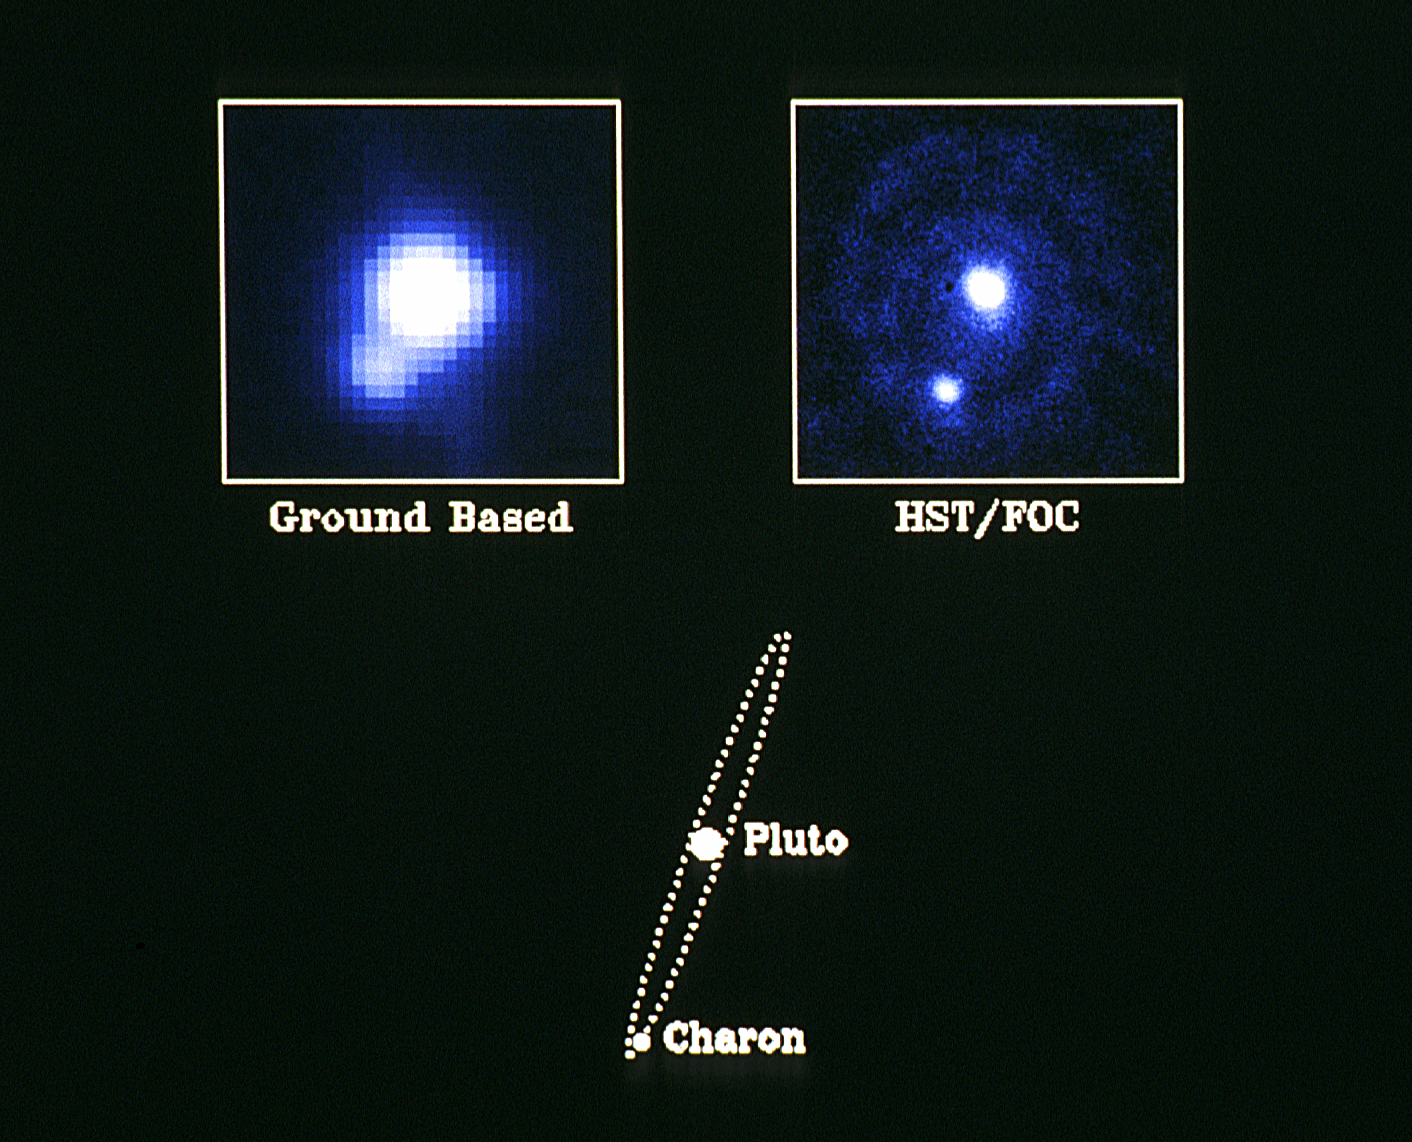

Pluto - the "double planet"

NASA/ESA Hubble Space Telescope has obtained the clearest pictures ever of our solar system's most distant and enigmatic object: the planet Pluto. The observations were made with the European Space Agency's Faint Object Camera. The ninth and last real planet known, and the only planet that has not been visited by a fly-by spacecraft, Pluto was discovered just 60 years ago by the American astronomer Clyde Tombaugh, who was searching for the source of irregularities seen in the orbits of Uranus and Neptune. It has become apparent since then that Pluto is a very peculiar object. Its orbit is tilted and is more elliptical than the orbits of any of the other planets in the solar system. Pluto also rotates upside down with its North Pole below the plane of the solar system in the opposite sense of the Earth and most of the other planets. Pluto is smaller than our own Moon and also denser than any of its neighbors in the outer solar system. But, perhaps, its most fascinating property was uncovered only 12 years ago when a huge companion "moon" called Charon was detected from ground based photographs. Subsequent investigations have shown that Charon is about half the size of Pluto making it the largest known satellite relative to its planet in the solar system. In fact, because of this, Pluto is often referred to as a double planet. The rotation period of the Pluto-Charon system is a mere 6 days. A recent Faint Object Camera image of Pluto and Charon is shown in the upper right hand frame of the accompanying photograph. This image is the first long duration HST exposure ever taken of a moving target. In order to avoid smearing of the images, ground controllers had to pre-program the HST spacecraft to track Pluto extremely accurately and compensate exactly for the "parallax" introduced by the combined motions of Pluto, the Earth and HST in their respective orbits. Pluto is currently near its closest approach to the Earth in its 249 year journey around the Sun, and is approximately four and a half billion kilometers away. The bright object at the center of the frame is Pluto while Charon is the fainter object in the lower left. Charon is fainter than Pluto because it is smaller and, probably, because its surface is covered by water ice whereas Pluto is thought to be covered mainly by the more reflective methane frost or snow. As indicated in the diagram at the bottom of the photograph, Charon's orbit around Pluto is a circle seen nearly edge on from Earth, with a radius of almost twenty thousand kilometers - a distance equal to approximately one and a half times the diameter of the Earth. At the time of observation, Charon was near its maximum apparent distance from Pluto, so that its angular separation was about nine tenths of an arcsecond. Because of the peculiar orientation of the Pluto-Charon orbit with respect to our line of sight, Charon approaches to within less than one tenth of an arcsecond of Pluto every three days. Due to the physical proximity of the two planets and the great distance to the system, it is extremely difficult to clearly resolve the pair from the Earth except in exceptional circumstances. The best ground based image of Pluto and Charon ever taken to date is shown in the upper left hand frame in the accompanying photograph. This image was taken with the Canada-France-Hawaii telescope in Hawaii. The superior resolution of the FOC image is evident. Further HST observations of Pluto and Charon will be extremely important in elucidating the nature and the origin of this fascinating and frigid world where the average temperature approaches minus 215 degrees centigrade - only 58 degrees above absolute zero. Although the "fog" surrounding the images caused by the spherical aberration of the primary mirror prevents the FOC from resolving surface features, several other critical pieces of information can be extracted from continuing FOC observations of these objects. Detailed analysis of the brightness variations of the two planets will provide a wealth of information on their surfaces and atmospheres which are impossible to obtain from the ground. Precise measurements of the orbital parameters of the Pluto-Charon system are now also possible. This will enable astronomers to measure the individual masses and densities of the two objects - thereby providing important clues to their origins. One possibility is that objects similar to Pluto and Charon were created in great numbers in the outer fringes of the primordial solar nebula, but the majority of,these "planetary embryos" were either expelled from the inner solar system or gobbled up by the giant planets Jupiter, Saturn, Uranus, and Neptune. Only Pluto 'and Charon survived independently to this day. Continued monitoring of these two fascinating objects at the outer edge of our solar system throughout the lifetime of HST will perhaps help astronomers understand the nebula from which we all originally formed.

Credit: NASA/ESA